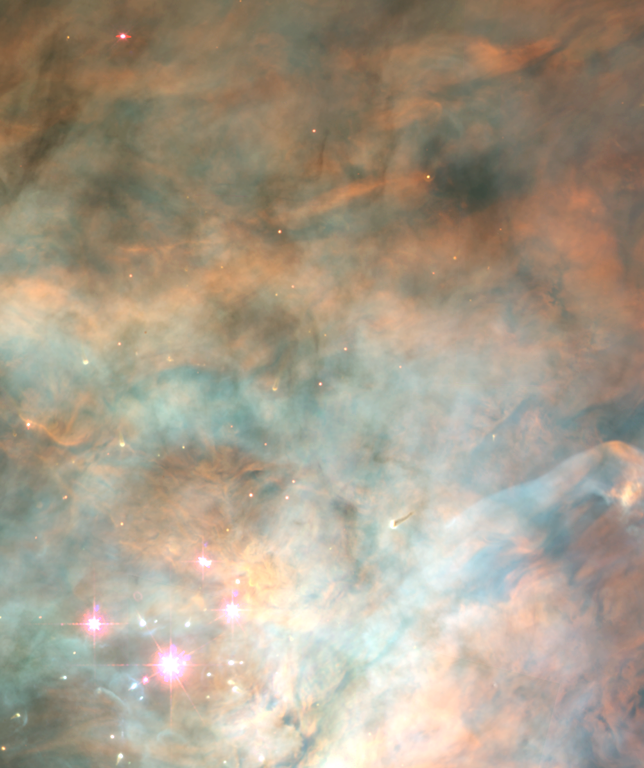

The Orion Nebula OMC-1 Region

Light from a few foreground stars seen in the WFPC2 image provides only a hint of the many other stars embedded in this dense cloud.

Credit: C. Robert O'Dell, Shui Kwan Wong (Rice University) and NASA/ESA